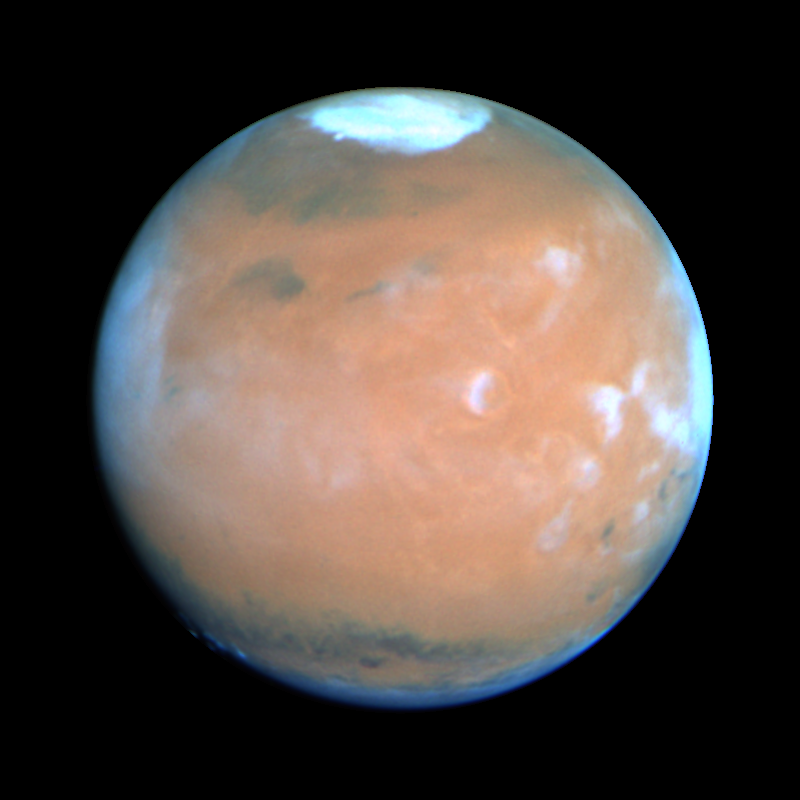

Mars at Opposition 1995 (Tharsis Region)

This Hubble Space Telescope view of the planet Mars is the clearest picture ever taken from Earth, surpassed only by close-up shots sent back by visiting space probes. The picture was taken on February 25, 1995, when Mars was at a distance of approximately 65 million miles (103 million km) from Earth.

Credit: Philip James (University of Toledo), Steven Lee (University of Colorado), NASA/ESA